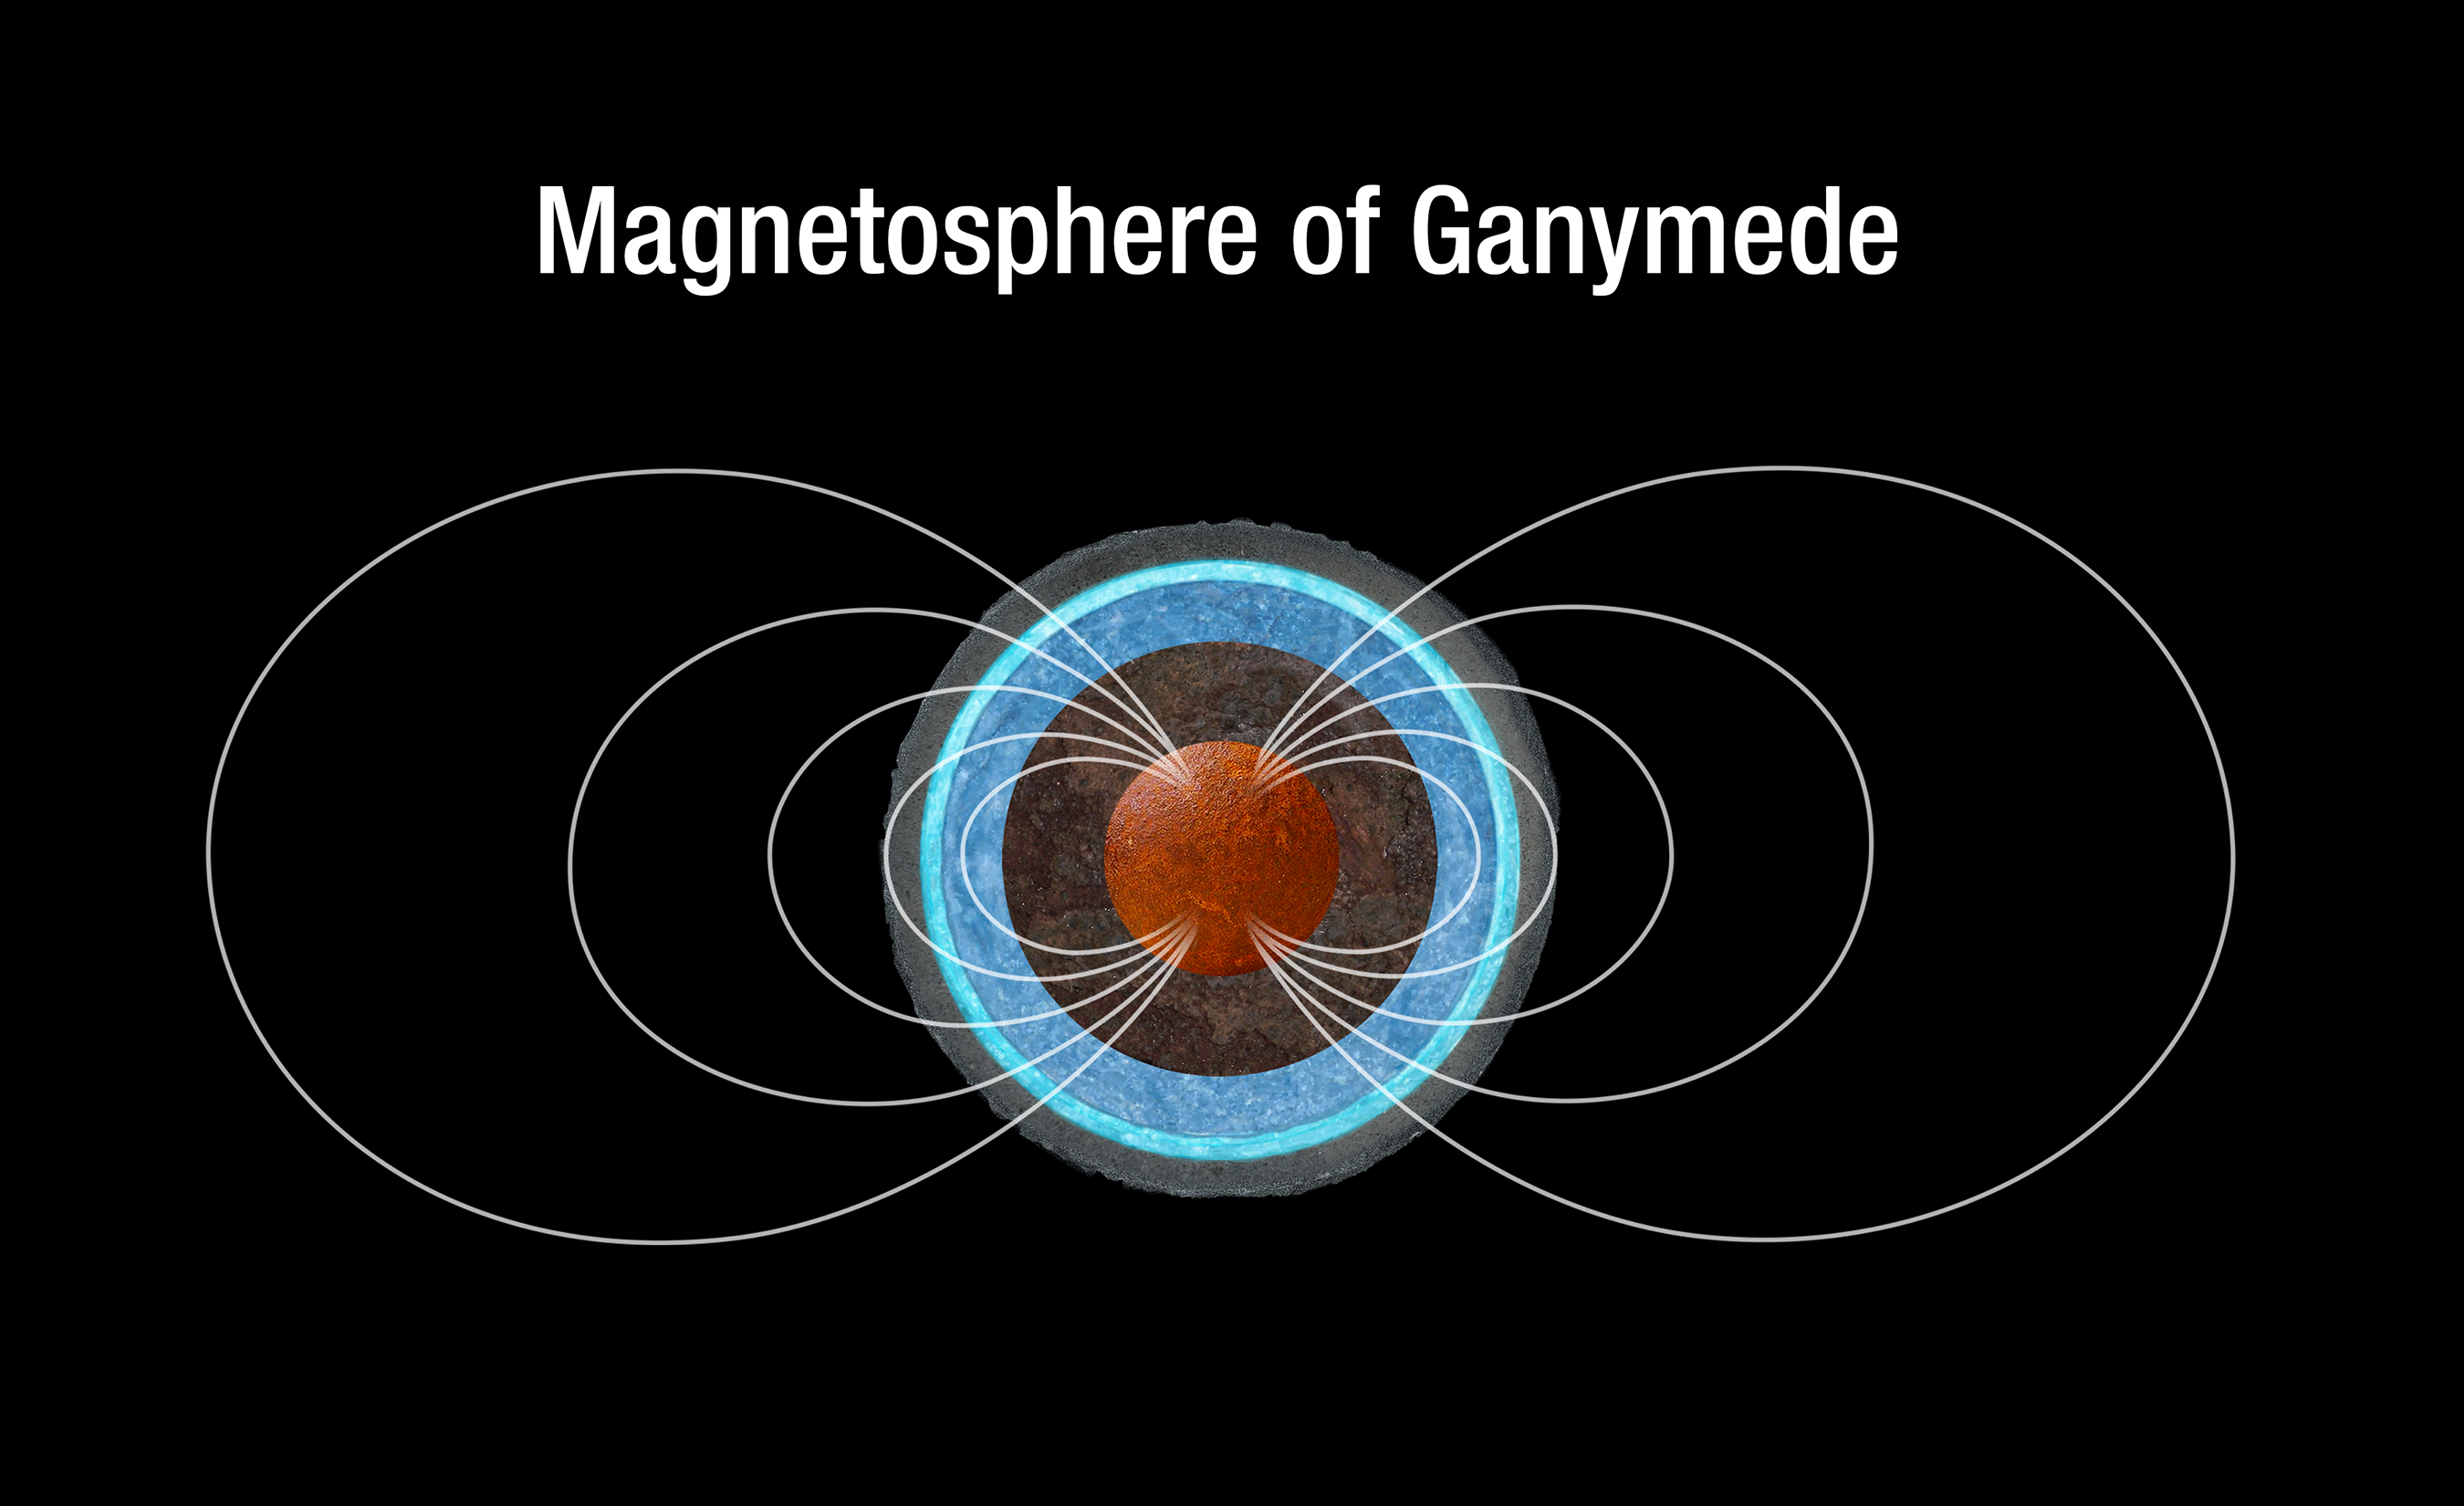

Ganymede’s magnetic field

This is a sketch of the magnetic field lines around Ganymede, which are generated in the moon's iron core. Hubble Space Telescope measurements of Ganymede's aurorae, which follow magnetic field lines, suggest that a subsurface saline ocean also influences the behavior of the moon's magnetosphere.

Credit: NASA, ESA, and A. Feild (STScI)